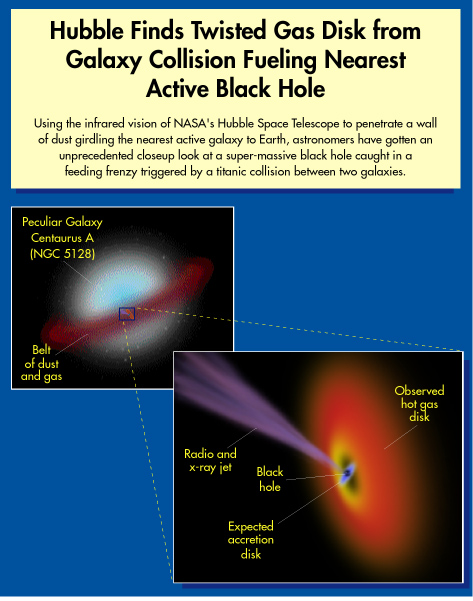

Hubble finds twisted gas disk from galaxy collision fueling nearest active black hole

Using the infrared vision of NASA's Hubble Space Telescope to penetrate a wall of dust girdling the nearest active galaxy (NGC 5128) to Earth, astronomers have gotten an unprecedentet closeup look at a super-massive black hole caught in a feending frenzy triggered by a titanic collision between two galaxies.

Observations showed a hot gas disk surrounding the super-massive black hole as well as radio and x-ray jets created by it. The accretion disk and the black hole itself are too small to be observed directly.

Credit: NASA & ESA